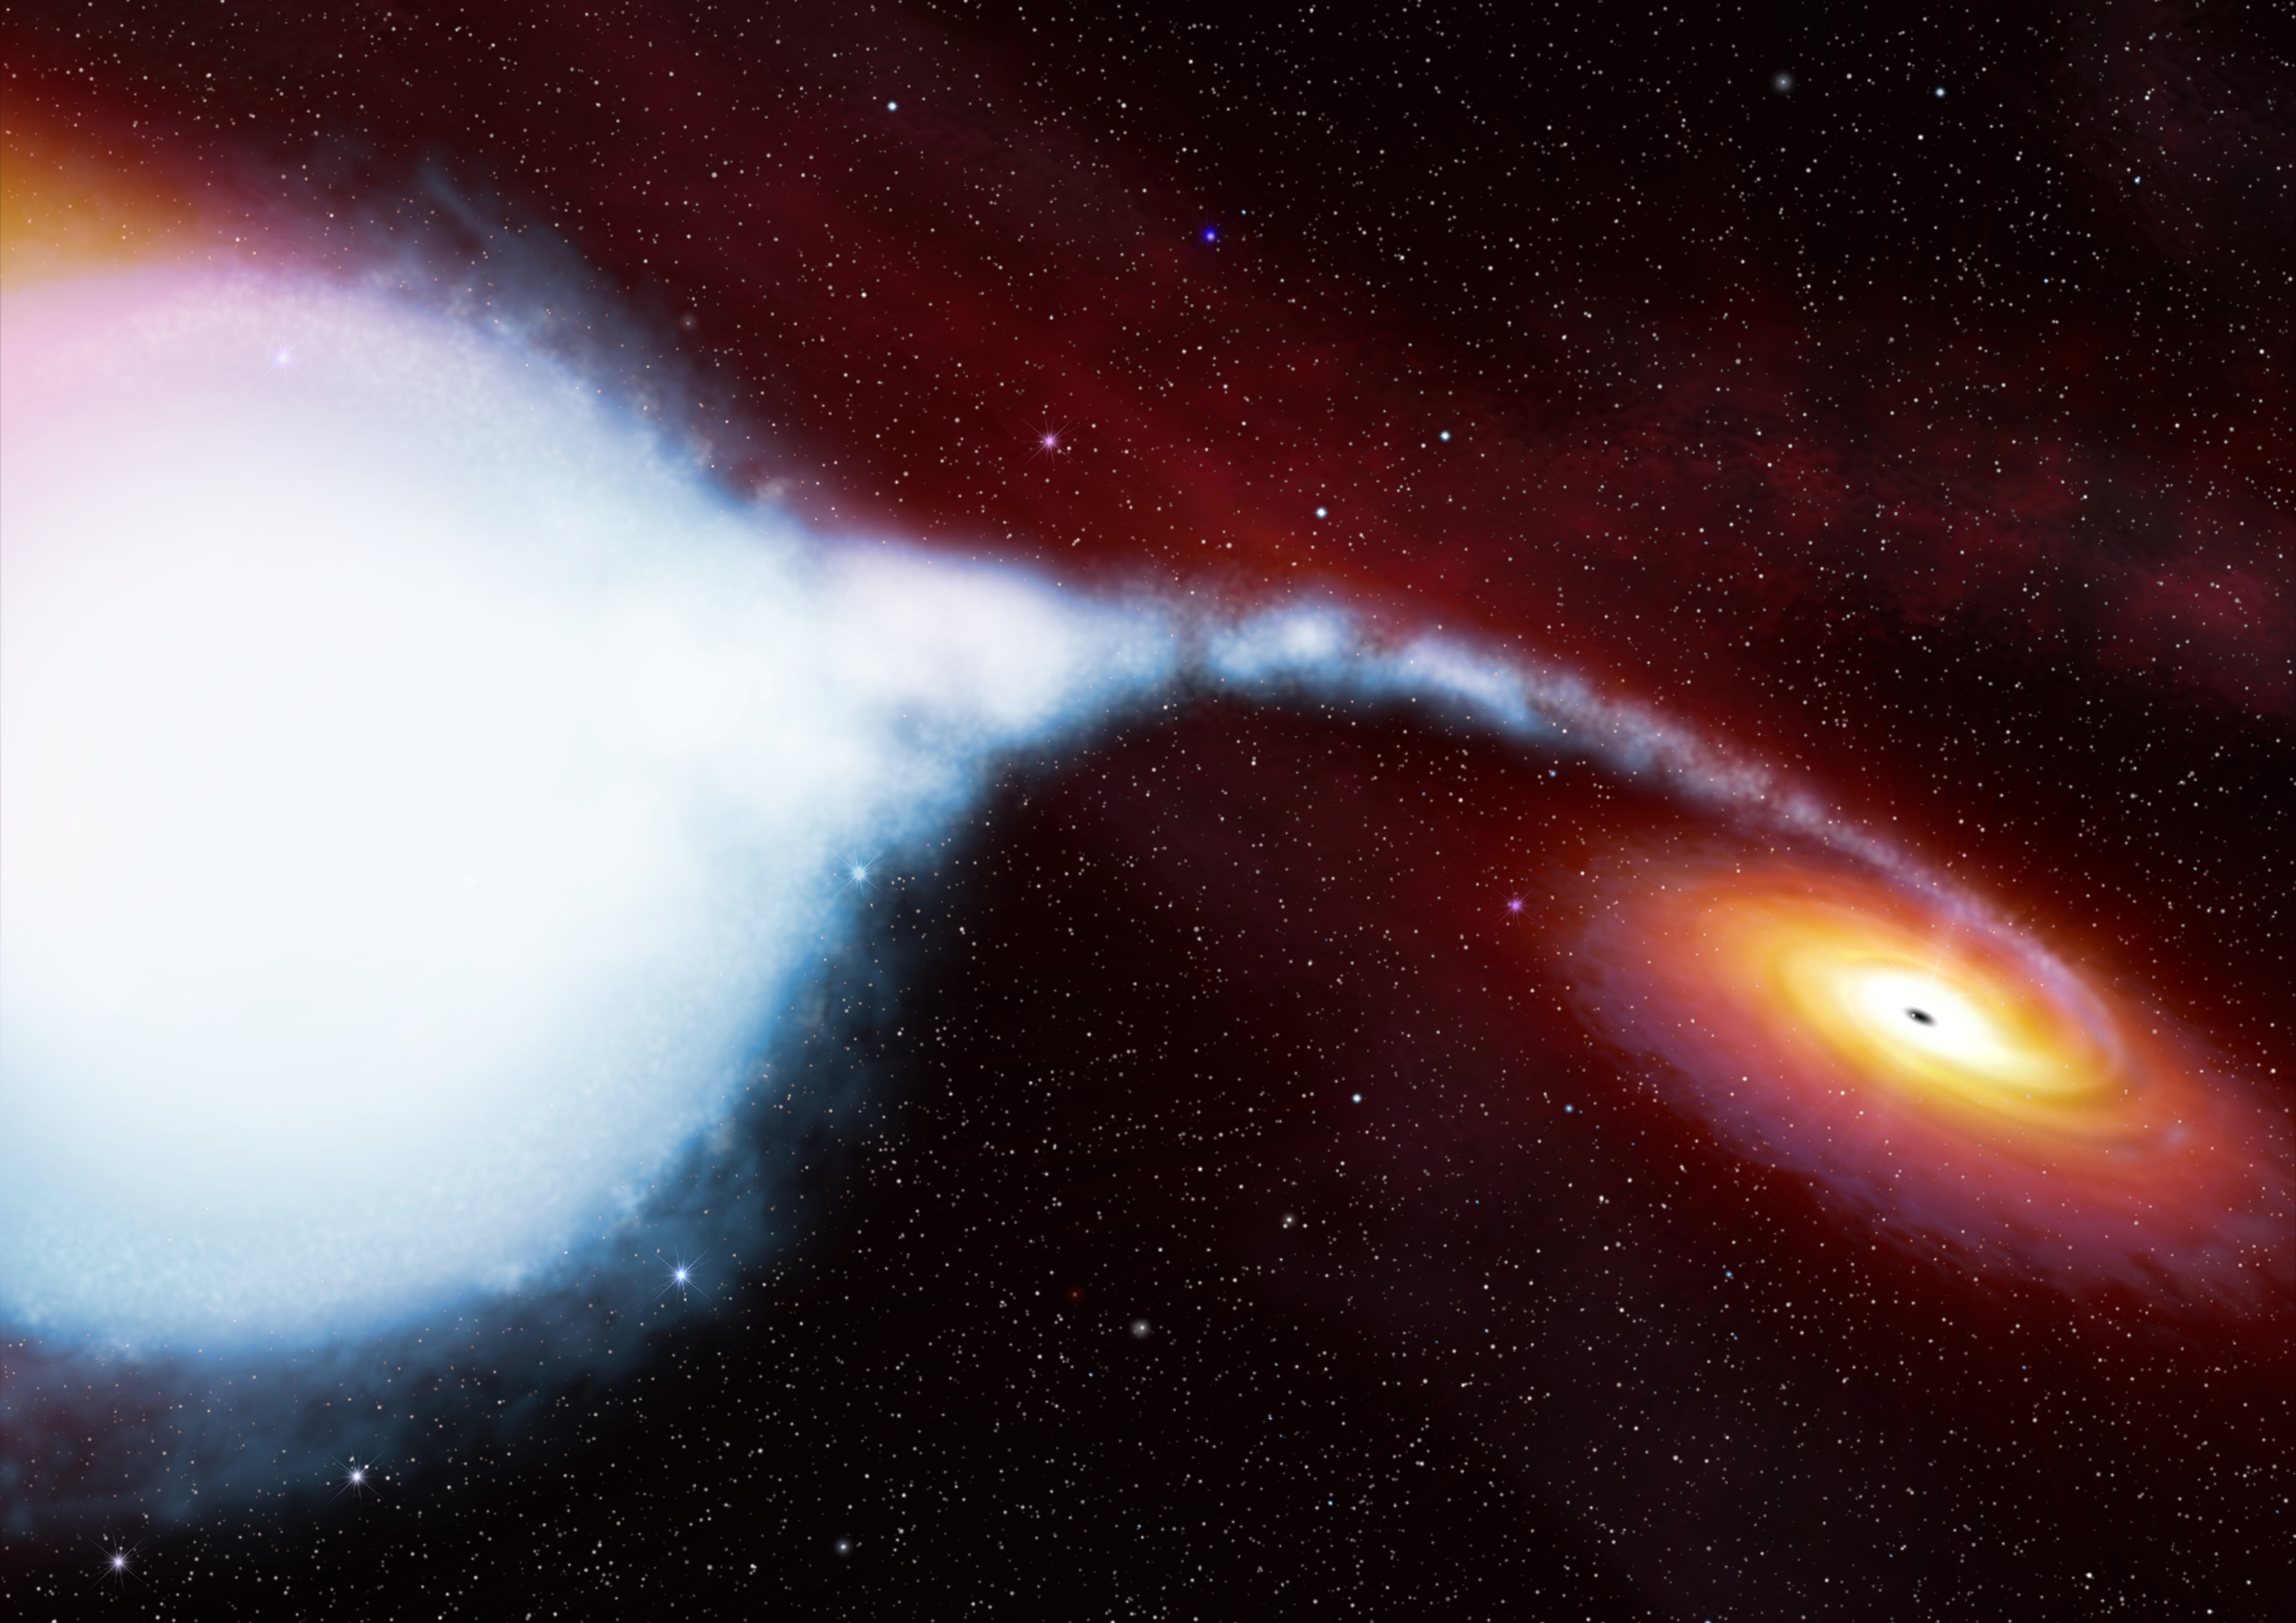

Artist's impression of Cygnus X-1

Cygnus X-1 is located about 10 000 light years from Earth. It is one of the more violent places in our Galaxy. The black hole, Cygnus X-1, contains about five times the mass of the Sun, squeezed into a tiny sphere a few kilometres in diameter. Because of its density, it possesses an enormous gravitational field, which is pulling matter away from its companion star, HDE 226868. The companion is a massive star, known as a blue supergiant. It has an extremely hot surface temperature of 31 000K. As the gas spirals towards the black hole, it is heated even further and gives off X-rays and gamma rays. Uniquely, Integral can detect all these types of radiation.

Credit: NASA, ESA, Martin Kornmesser (ESA/Hubble)